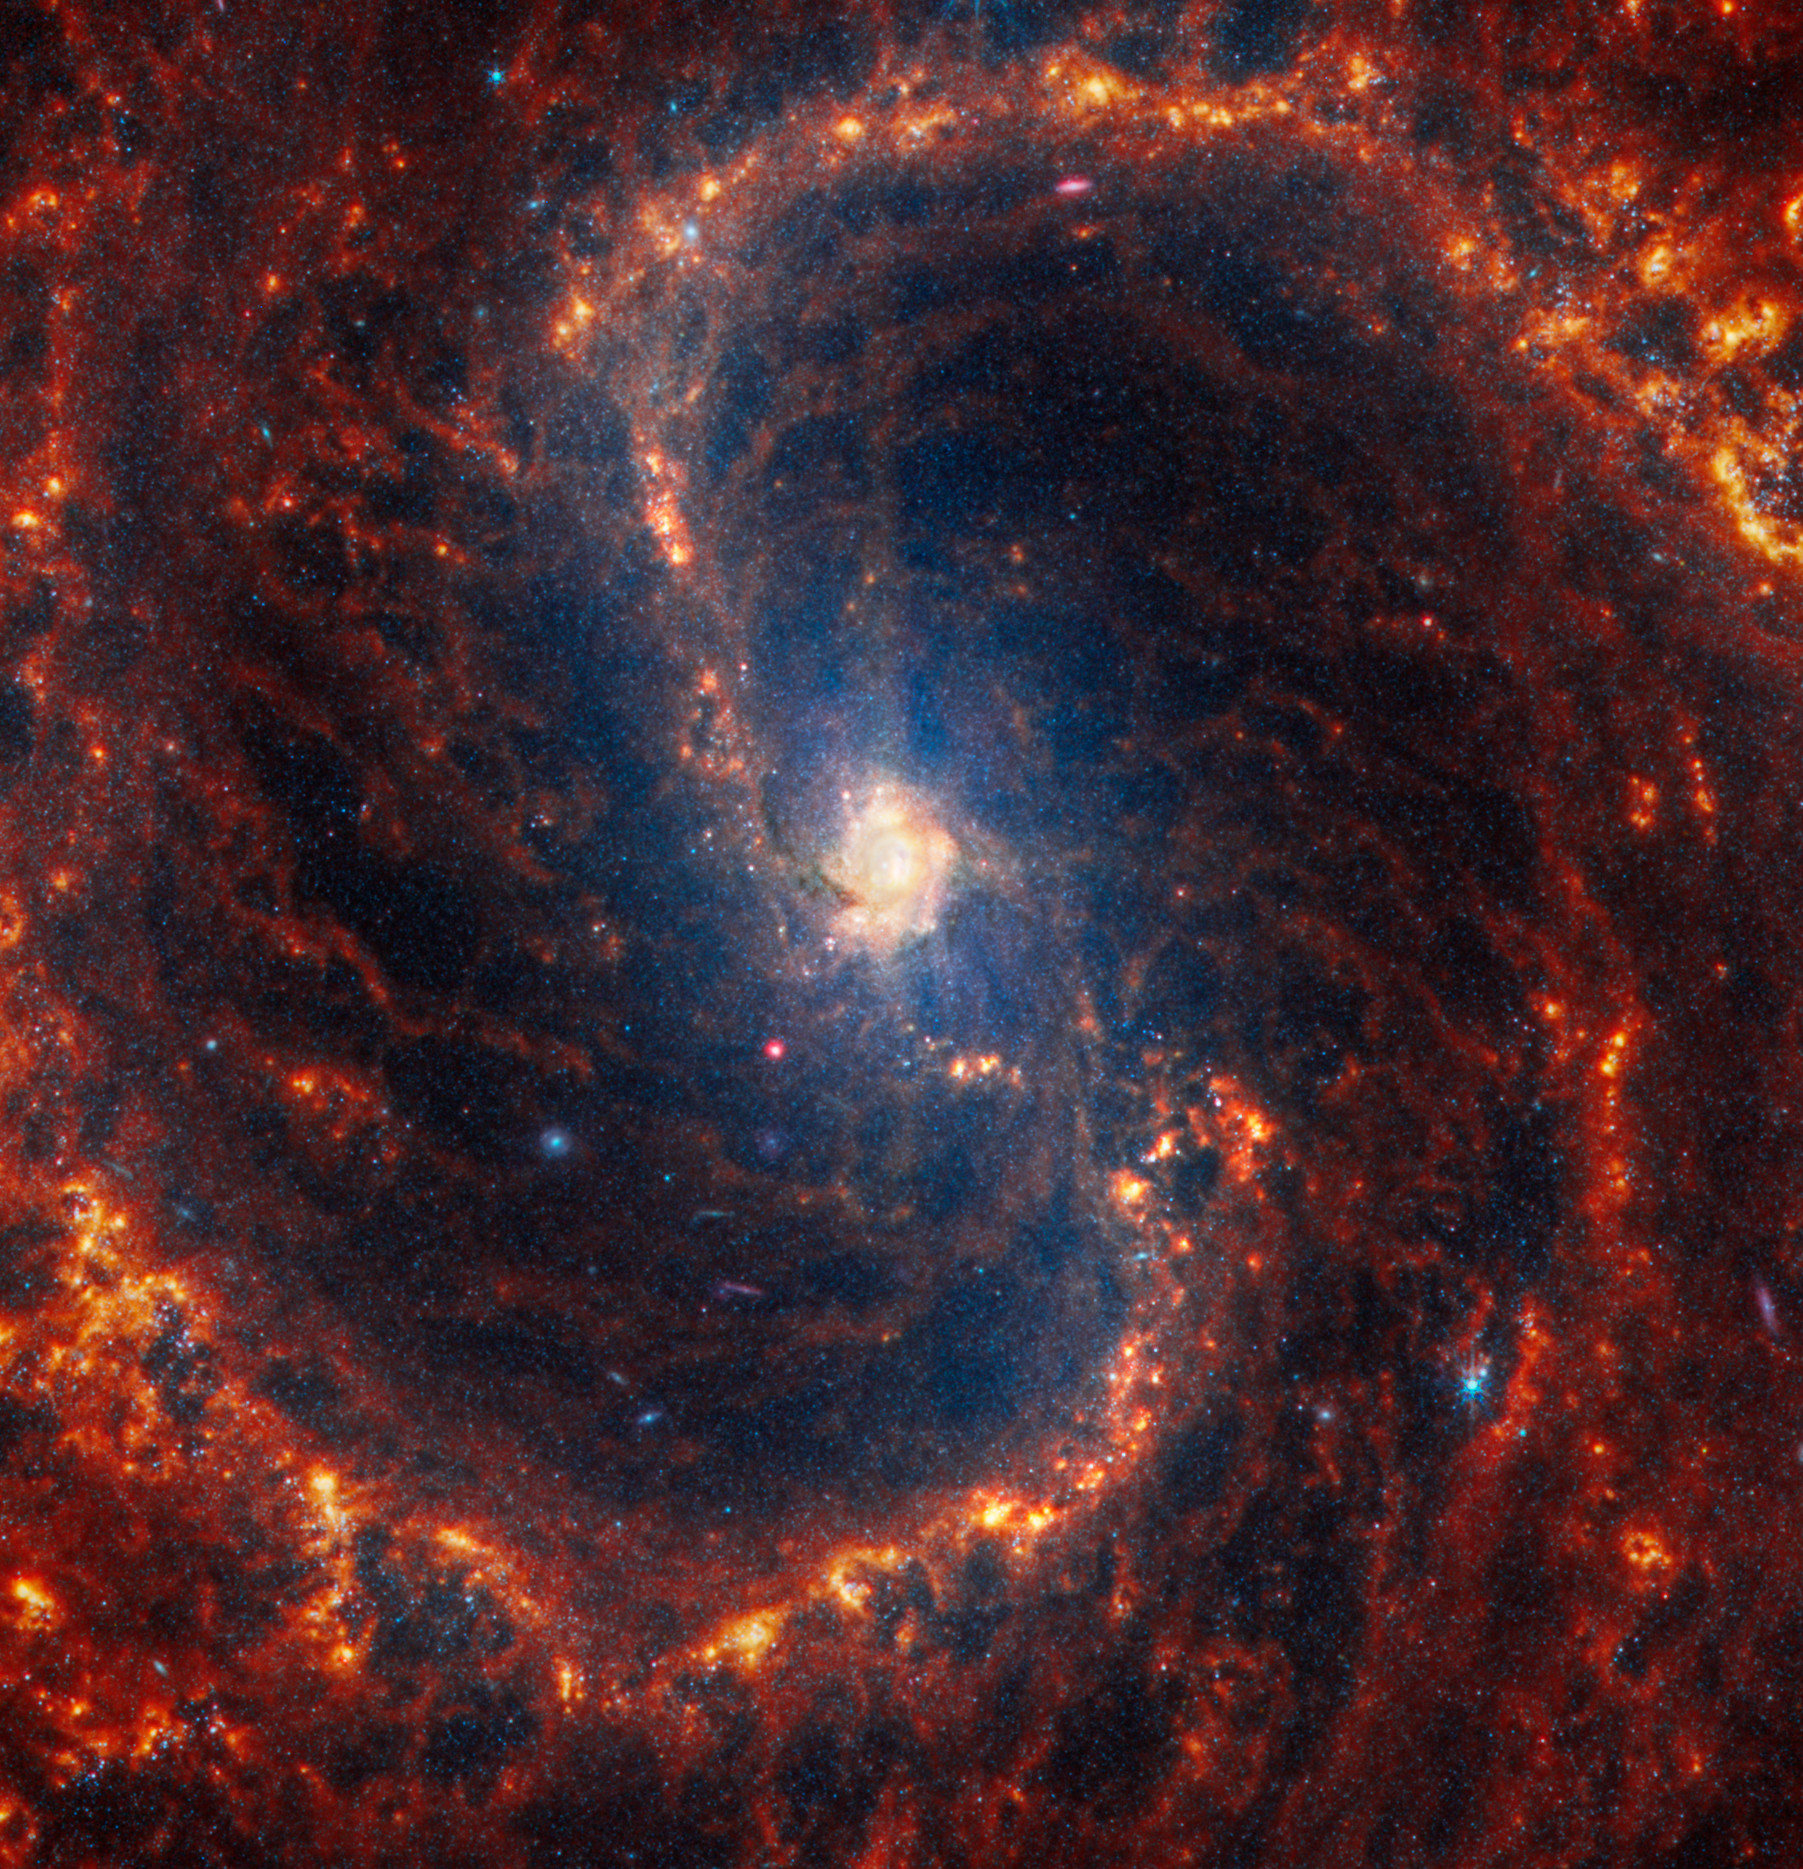

NGC 4535

This spiral galaxy was observed as part of the Physics at High Angular resolution in Nearby GalaxieS (PHANGS) program, a large project that includes observations from several space- and ground-based telescopes of many galaxies to help researchers study all phases of the star formation cycle, from the formation of stars within dusty gas clouds to the energy released in the process that creates the intricate structures revealed by Webb’s new images.

NGC 4535 is 50 million light-years away in the constellation Virgo.

Learn more about what can be seen in this vast collection of Webb images here.

Credit: NASA, ESA, CSA, STScI, J. Lee (STScI), T. Williams (Oxford), PHANGS Team